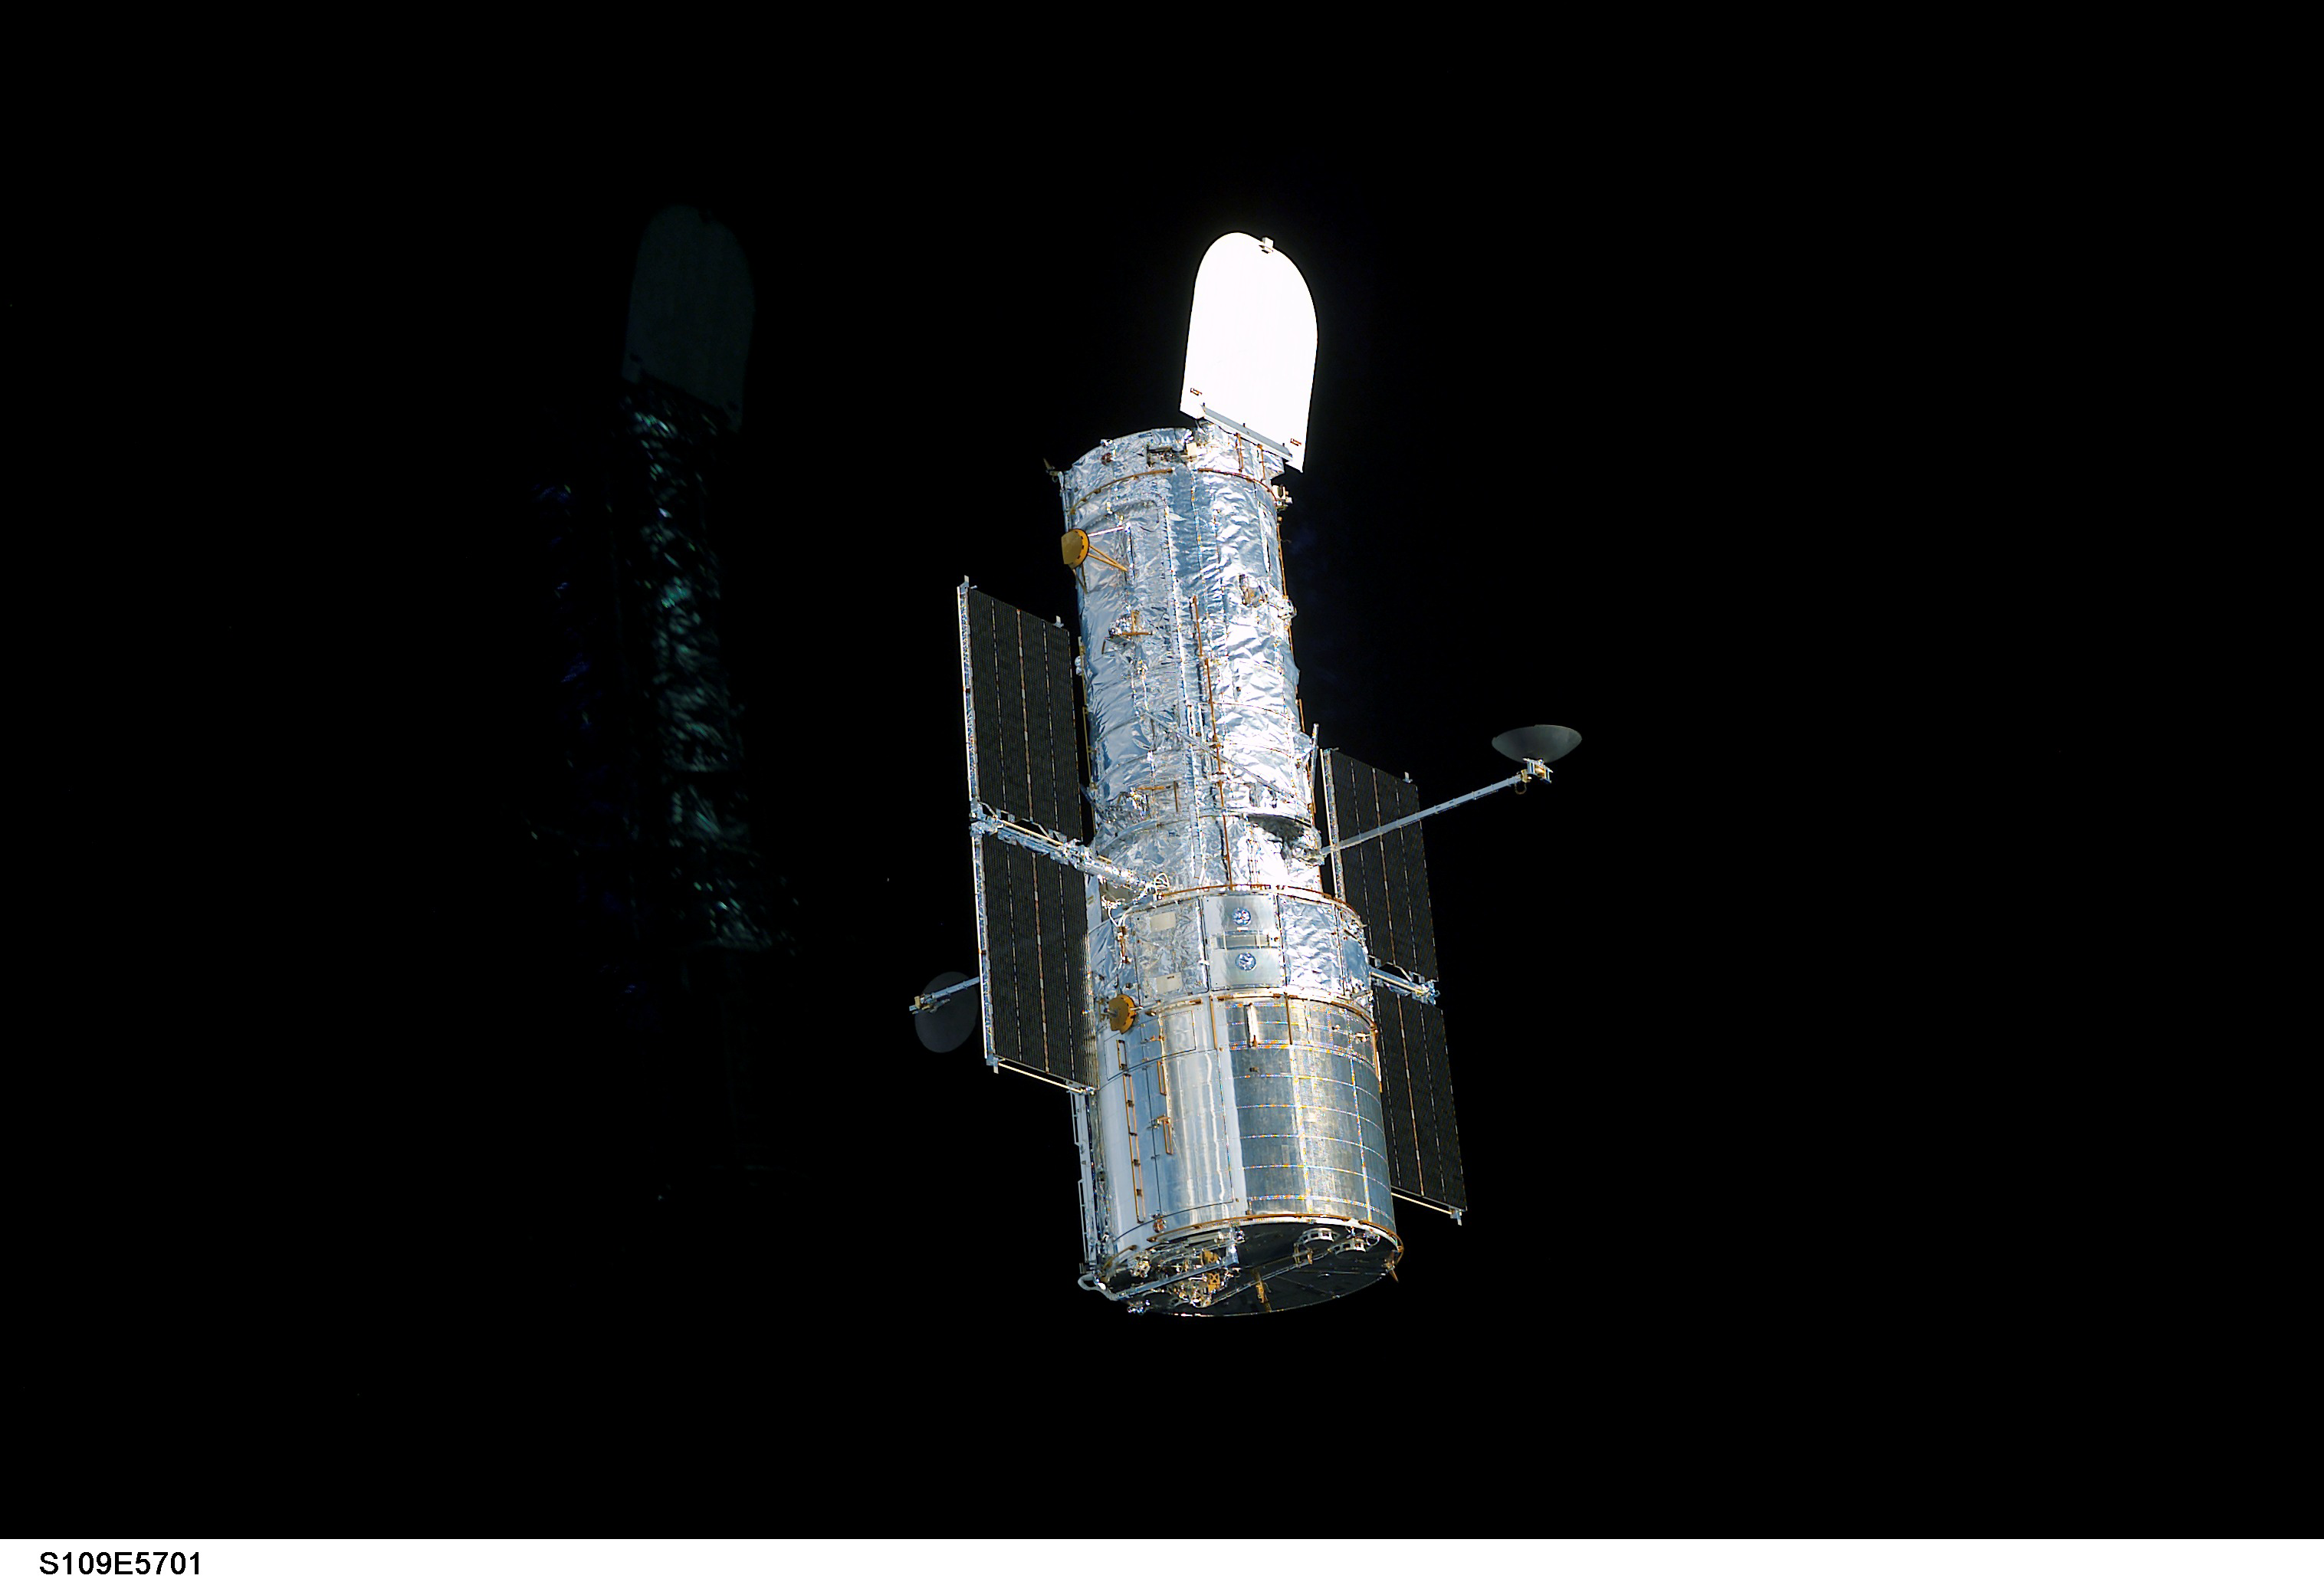

Hubble Space Telescope sporting new solar arrays during SM3B

STS109-E-5700 (9 March 2002) --- The Hubble Space Telescope, sporting new solar arrays and other important but less visible new hardware, begins its separation from the Space Shuttle Columbia. The STS-109 crew deployed the giant telescope at 4:04 a.m. CST (1004 GMT), March 9, 2002. Afterward, the seven crew members began to focus their attention to the trip home, scheduled for March 12. The STS-109 astronauts conducted five space walks to service and upgrade Hubble. This image was recorded with a digital still camera.

Credit: NASA/ESA